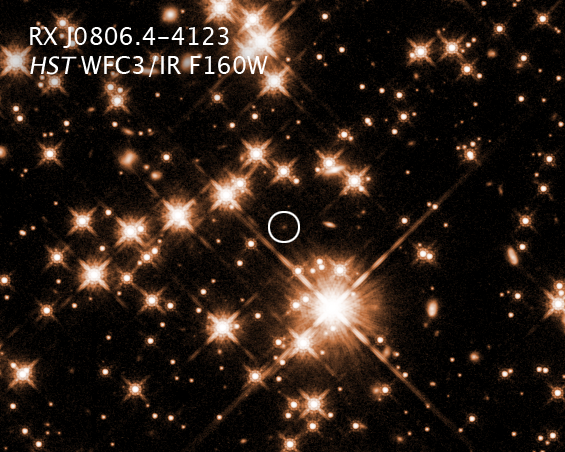

Hubble sees an unusual neutron star

This is a near-infrared-light image of the neutron star RX J0806.4-4123 taken with the NASA/ESA Hubble Space Telescope. Hubble detected an unusual excess of infrared radiation that might be evidence for a disc around the stellar remnant. Or it could be from a wind of charged particles streaming off the neutron star and slamming into gas in the interstellar medium the neutron star is plowing through.

Credit: NASA, ESA, and B. Posselt (Pennsylvania State University)